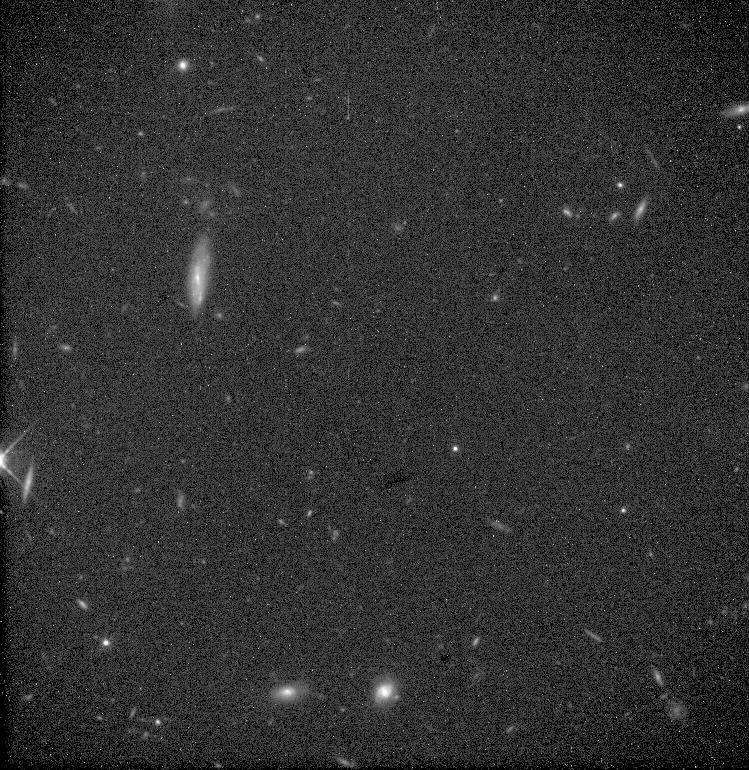

Dark Matter Search

The unmodified HST image shows the region is actually so devoid of stars that far more distant background galaxies can easily be seen.

Credit: J. Bahcall, Institute for Advance Study, Princeton and NASA/ESA